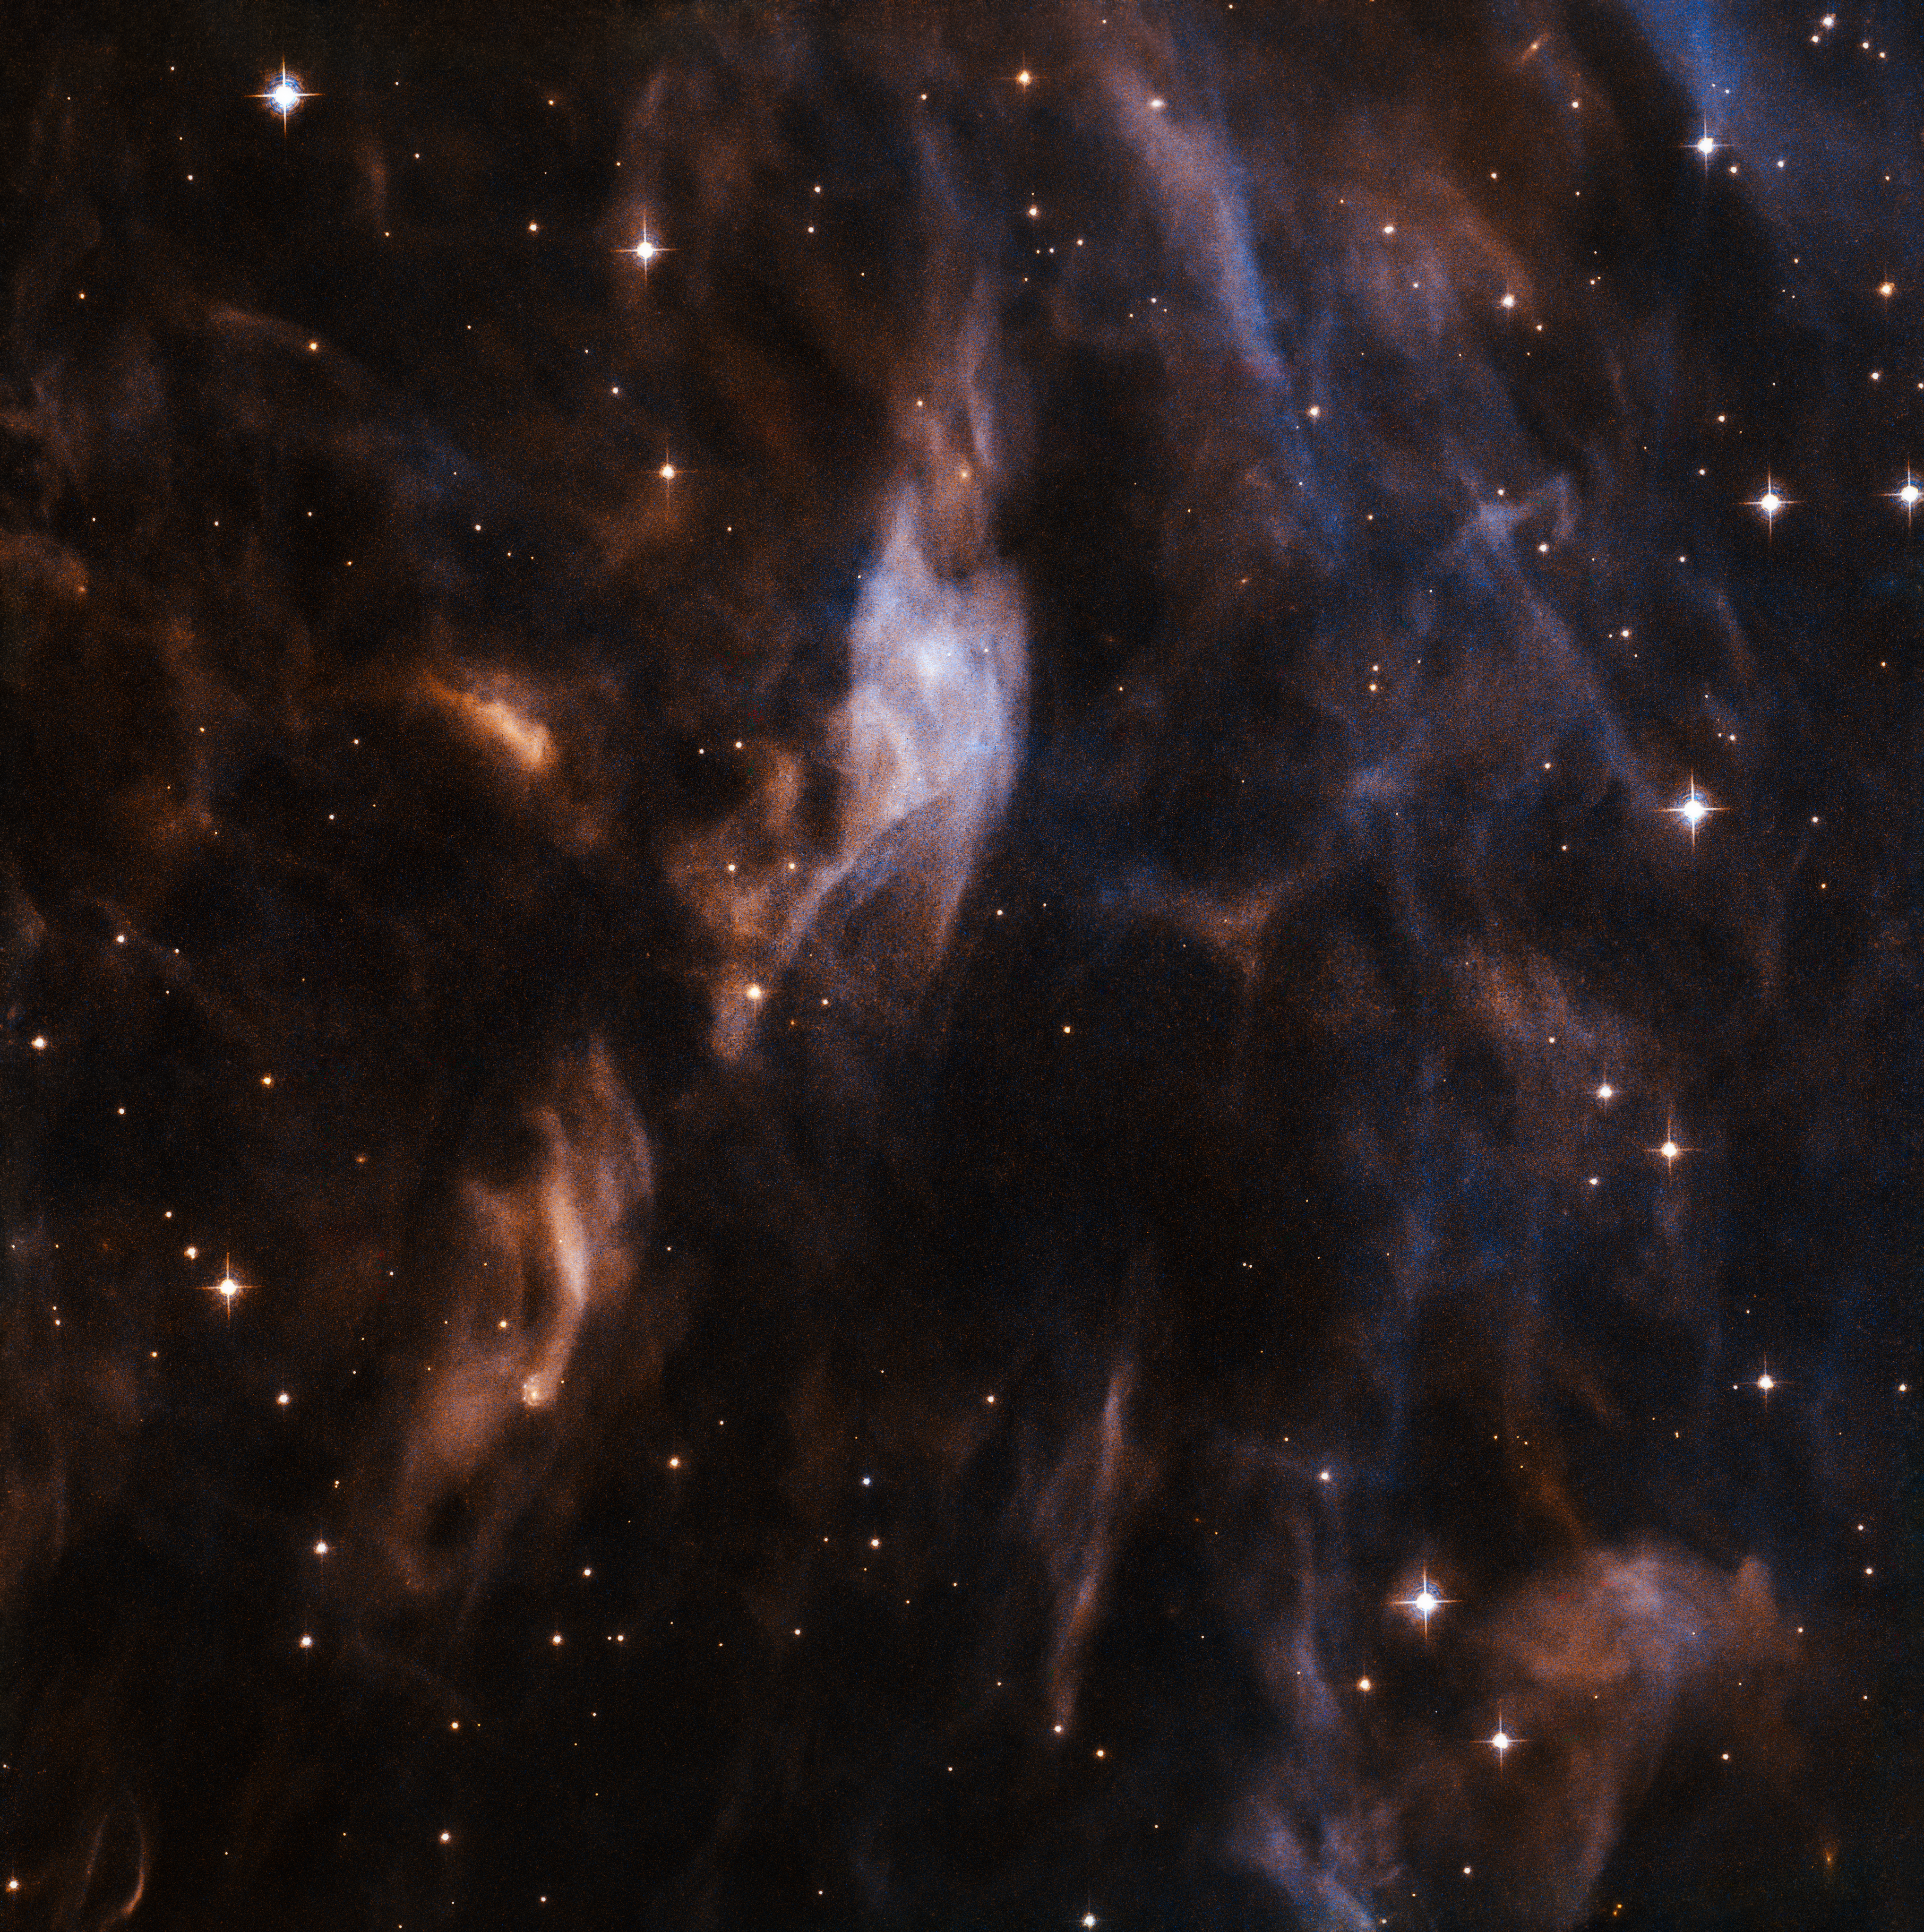

Inflating Sh2-308

The NASA/ESA Hubble Space Telescope still has a few tricks up its sleeve in its task of exploring the Universe. For one, it is able to image two adjacent parts of the sky simultaneously. It does this using two different cameras — one camera can be trained on the target object itself, and the other on a nearby patch of sky so that new and potentially interesting regions of the cosmos can be observed at the same time (these latter observations are known as parallel fields).

This image shows part of a bubble-like cloud of gas — a nebula named Sh2-308 — surrounding a massive and violent star named EZ Canis Majoris. It uses observations from Hubble’s Advanced Camera for Surveys, and is the parallel field associated with another view of the nebula produced by Hubble’s Wide Field Camera 3.

EZ Canis Majoris is something known as a Wolf-Rayet star, and is one of the brightest known stars of its kind. Its outer shell of hydrogen gas has been used up, revealing inner layers of heavier elements that burn at ferocious temperatures. The intense radiation pouring out from EZ Canis Majoris forms thick stellar winds that whip up nearby material, sculpting and blowing it outwards.

These processes have moulded the surrounding gas into a vast bubble. A bubble nebula produced by a Wolf-Rayet star is made of ionised hydrogen (HII), which is often found in interstellar space. In this case, it is the outer hydrogen layers of EZ Canis Majoris — the bubble — that are being inflated by the deluge of radiation — the air — coming from the central star. The fringes of these bubbles are nebulous and wispy, as can be seen in this image.

Credit: ESA/Hubble & NASA